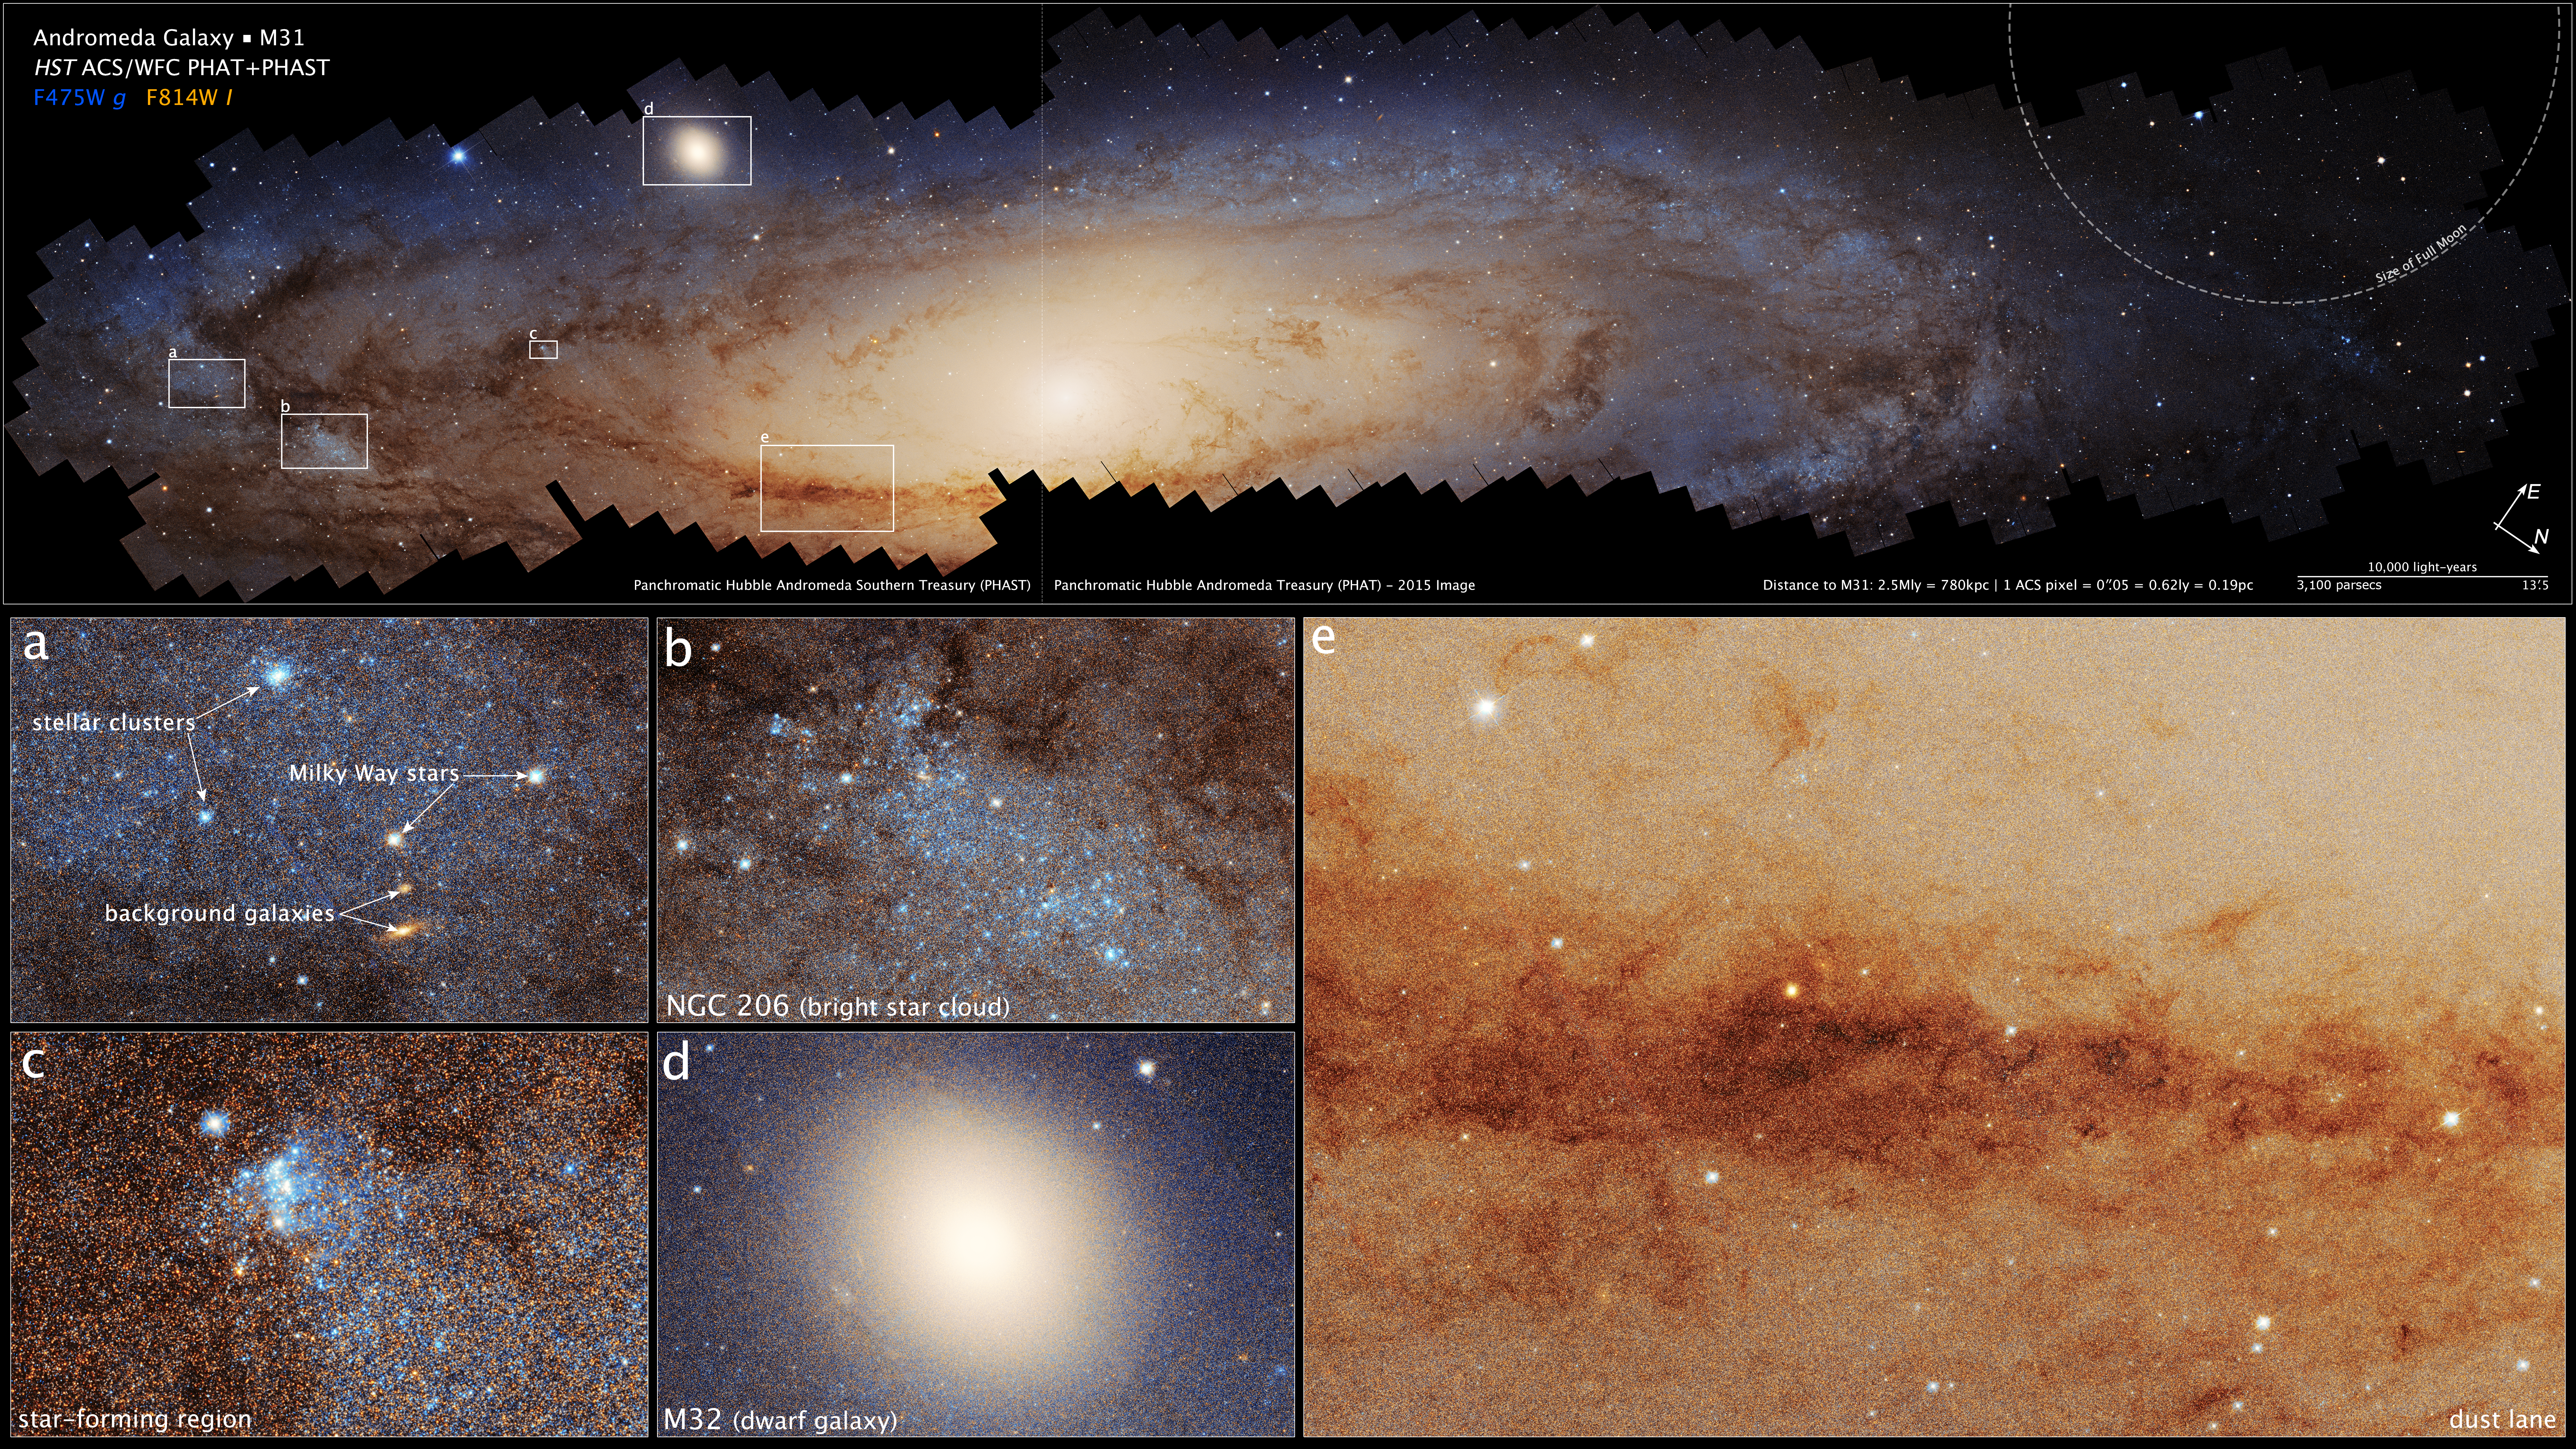

Hubble’s panoramic view of the Andromeda Galaxy (annotated)

This is the largest photomosaic ever made by the Hubble Space Telescope. The target is the vast Andromeda galaxy that is only 2.5 million light-years from Earth, making it the nearest galaxy to our own Milky Way. Andromeda is seen almost edge-on, tilted by 77 degrees relative to Earth’s view. The galaxy is so large that the mosaic is assembled from approximately 600 separate fields of view taken over 10 years of Hubble observing. The mosaic image is made up of at least 2.5 billion pixels. Hubble resolves an estimated 200 million stars that are hotter than our sun, but still a fraction of the galaxy’s total estimated stellar population.

Interesting regions include:

Clusters of bright blue stars embedded within the galaxy, background galaxies seen much farther away, and photo-bombing by a couple bright foreground stars that are actually inside our Milky Way;
NGC 206 the most conspicuous star cloud in Andromeda;
A young cluster of blue newborn stars;
The satellite galaxy M32, that may be the residual core of a galaxy that once collided with Andromeda;
Dark dust lanes across myriad stars.

Credit: NASA, ESA, B. Williams (U. of Washington)